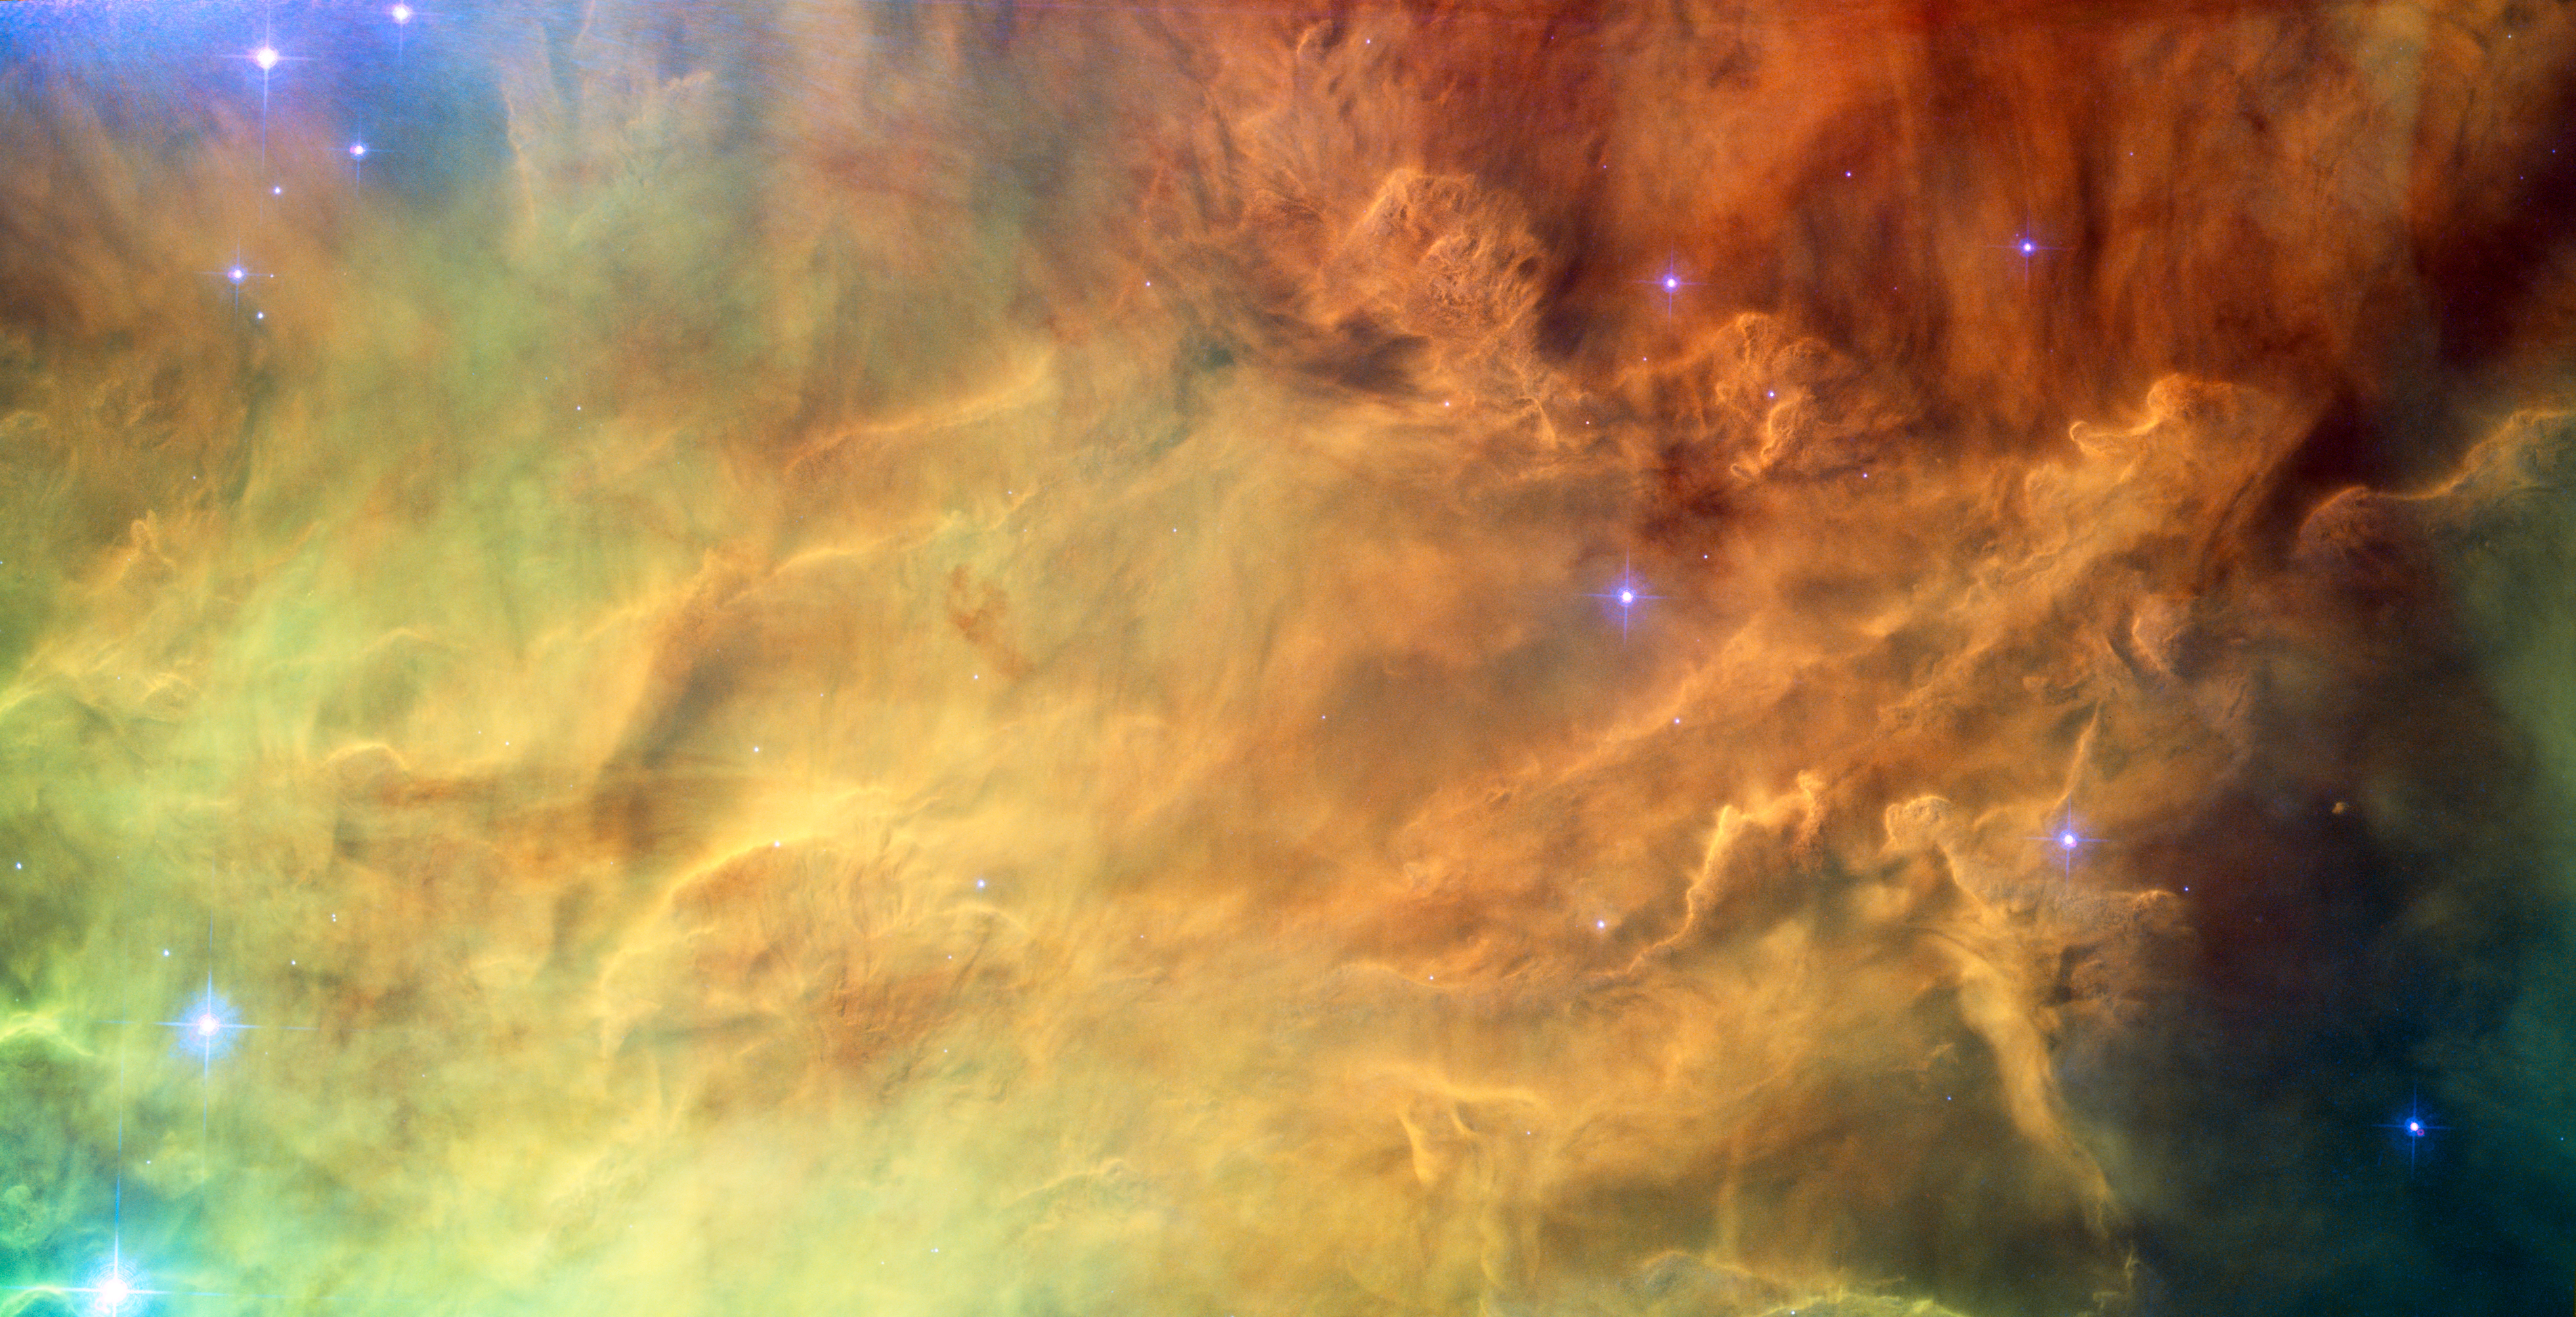

Waves breaking in the stellar lagoon

This close-up shot of the centre of the Lagoon Nebula (Messier 8) clearly shows the delicate structures formed when the powerful radiation of young stars interacts with the hydrogen cloud they formed from.

This image was created from exposures taken with the Wide Field Channel of the Advanced Camera for Surveys on Hubble. Light from glowing hydrogen (through the F658N filter) is coloured red. Light from ionised nitrogen (through the F660N filter) is coloured green and light through a yellow filter (F550M) is coloured blue. The exposure times through each filter are 1560 s, 1600 s and 400 s respectively. The blue-white flare at the upper-left of the image is scattered light from a bright star just outside the field of view. The field of view is about 3.3 by 1.7 arcminutes.

Credit: NASA, ESA.